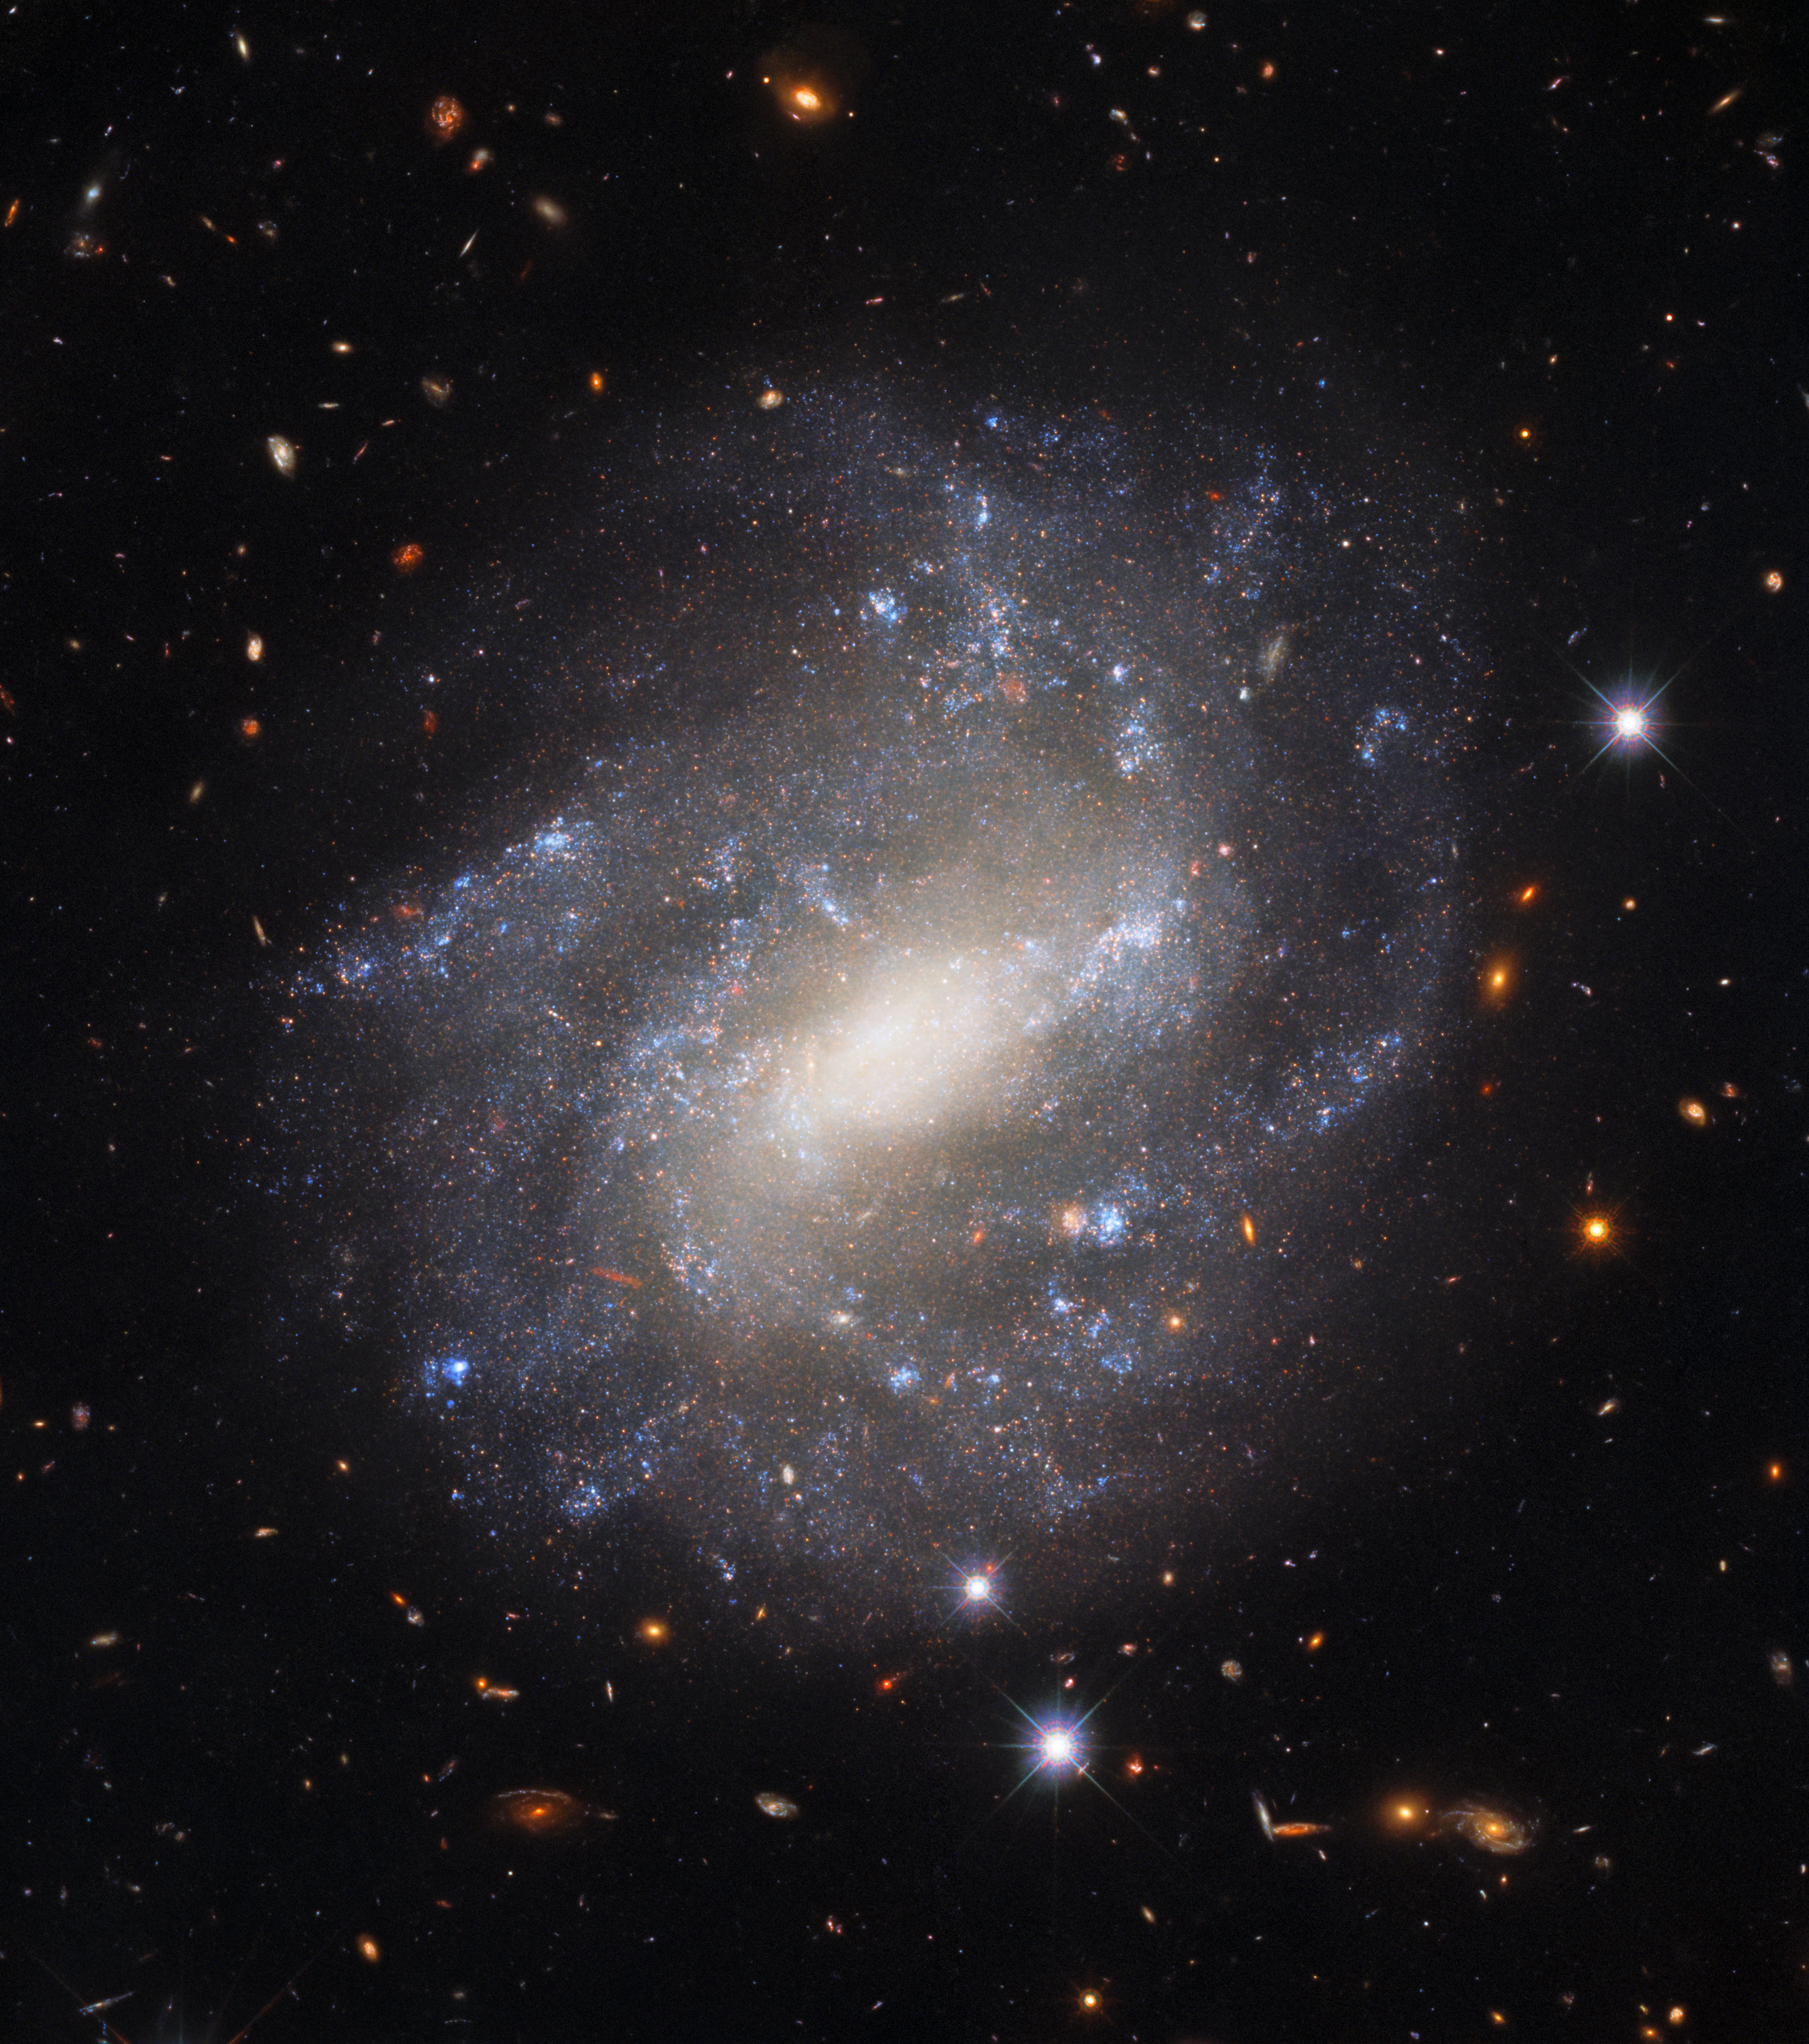

Lonely Spiral

The lonely spiral galaxy UGC 9391 is shown in this image from the NASA/ESA Hubble Space Telescope’s Wide Field Camera 3. This galaxy resides 130 million light-years from Earth in the constellation Draco near the north celestial pole. The star-studded spiral arms stand in splendid isolation against a backdrop of distant galaxies, which are only visible as indistinct swirls or smudges thanks to their vast distances from Earth. The image also features some much brighter foreground stars closer to home. These bright nearby stars are ringed with diffraction spikes — prominent spikes caused by light interacting with the inner workings of Hubble’s complicated optics.

This image is from a set of Hubble observations which astronomers used to construct the “Cosmic Distance Ladder” — a set of connected measurements allowing the distances to the most distant astronomical objects to be determined. Astronomical distances are only directly measurable for relatively nearby objects — closer than 3000 light-years or so. For distances beyond this, astronomers rely on a set of measured correlations calibrated against nearby objects. UGC 9391 helped astronomers improve their distance estimates by providing a natural laboratory in which to compare two measuring techniques — supernova explosions and Cepheid variables. Improving the precision of distance measurements helps astronomers quantify how quickly the Universe is expanding — one of Hubble’s key science goals.

Credit: ESA/Hubble & NASA, A. Riess et al.